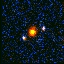

Hubble's Top Ten Gravitational Lenses. A View of HST 01247+0352

HST 01247+0352 is another pair of bluer lensed source images around the red spherical elliptical lensing galaxy.

Credit: Kavan Ratnatunga (Carnegie Mellon Univ.) and NASA/ESA